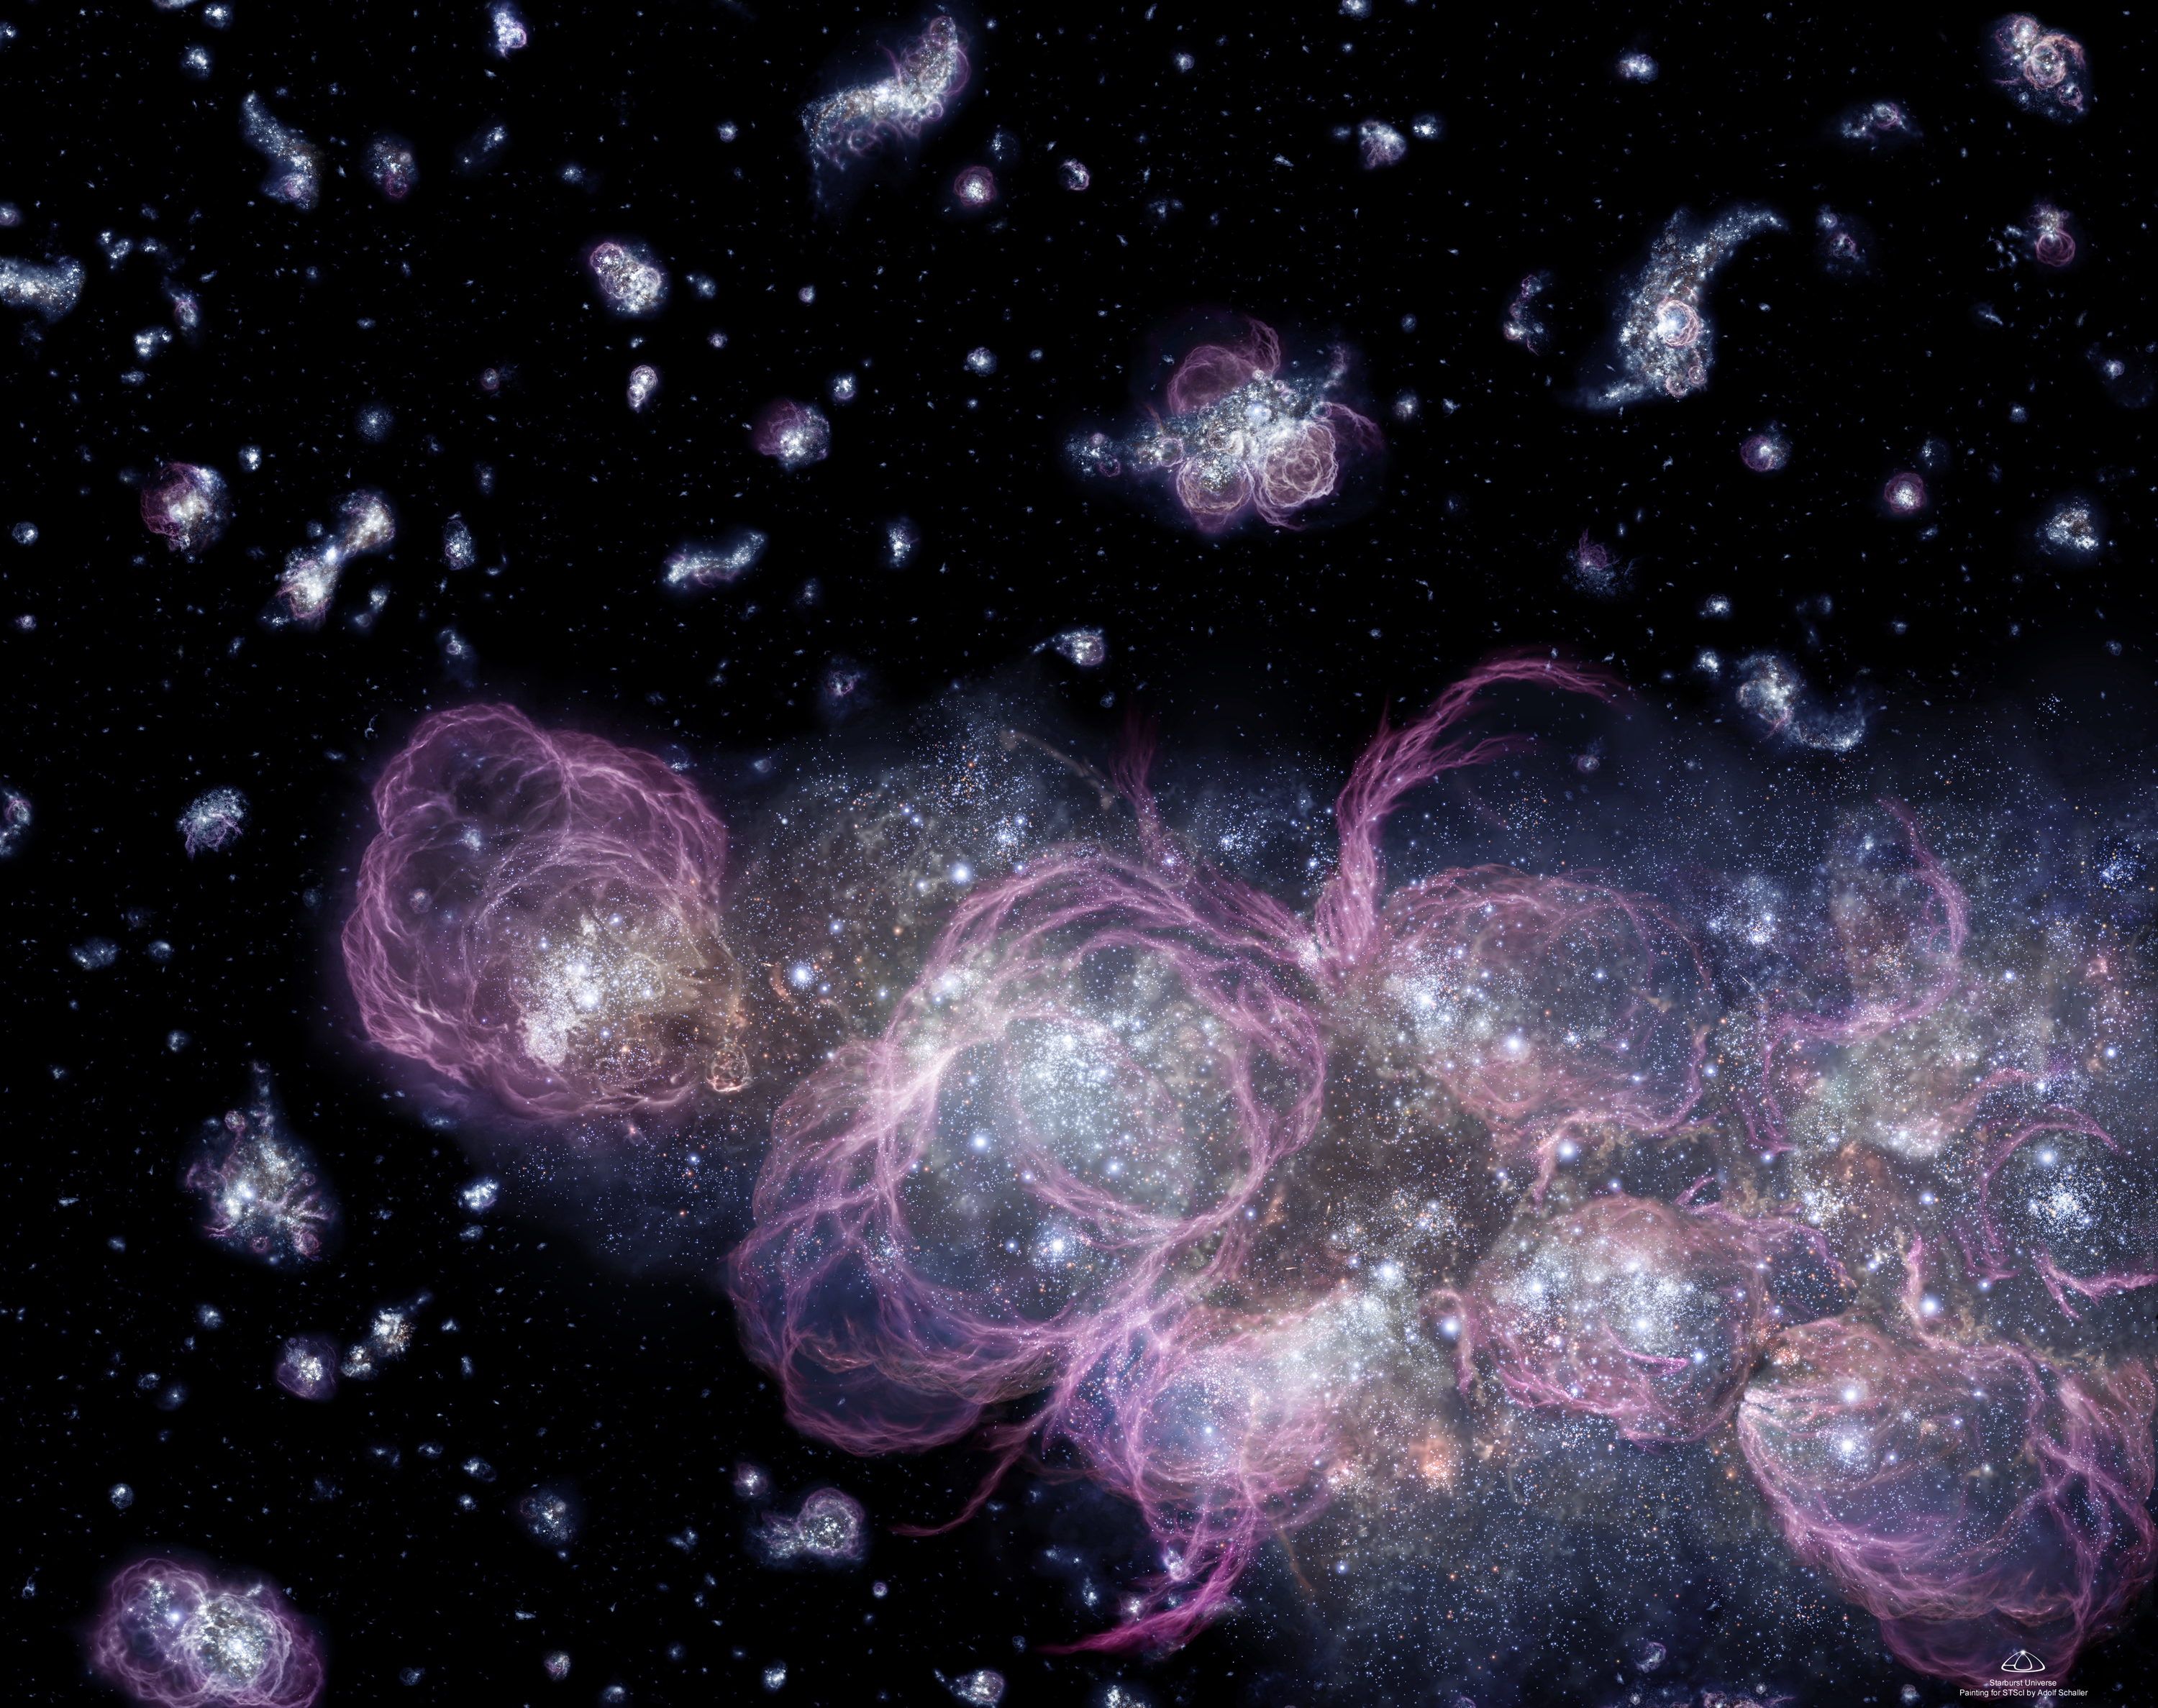

Stellar 'Fireworks Finale' Came First in the Young Universe (artist's impression)

The deepest views of the cosmos from the Hubble Space Telescope yield clues that the very first stars may have burst into the universe as brilliantly and spectacularly as a fireworks finale. Except in this case, the finale came first, long before Earth, the Sun and the Milky Way Galaxy formed.

Studies of Hubble's deepest views of the heavens lead to the preliminary conclusion that the universe made a significant portion of its stars in a torrential firestorm of star birth, which abruptly lit up the pitch-dark heavens just a few hundred million years after the 'big bang, ' the tremendous explosion that created the cosmos.

Though stars continue to be born today in galaxies, the star birth rate could be a trickle compared to the predicted gusher of stars in those opulent early years.

Credit: A. Schaller (STScI)